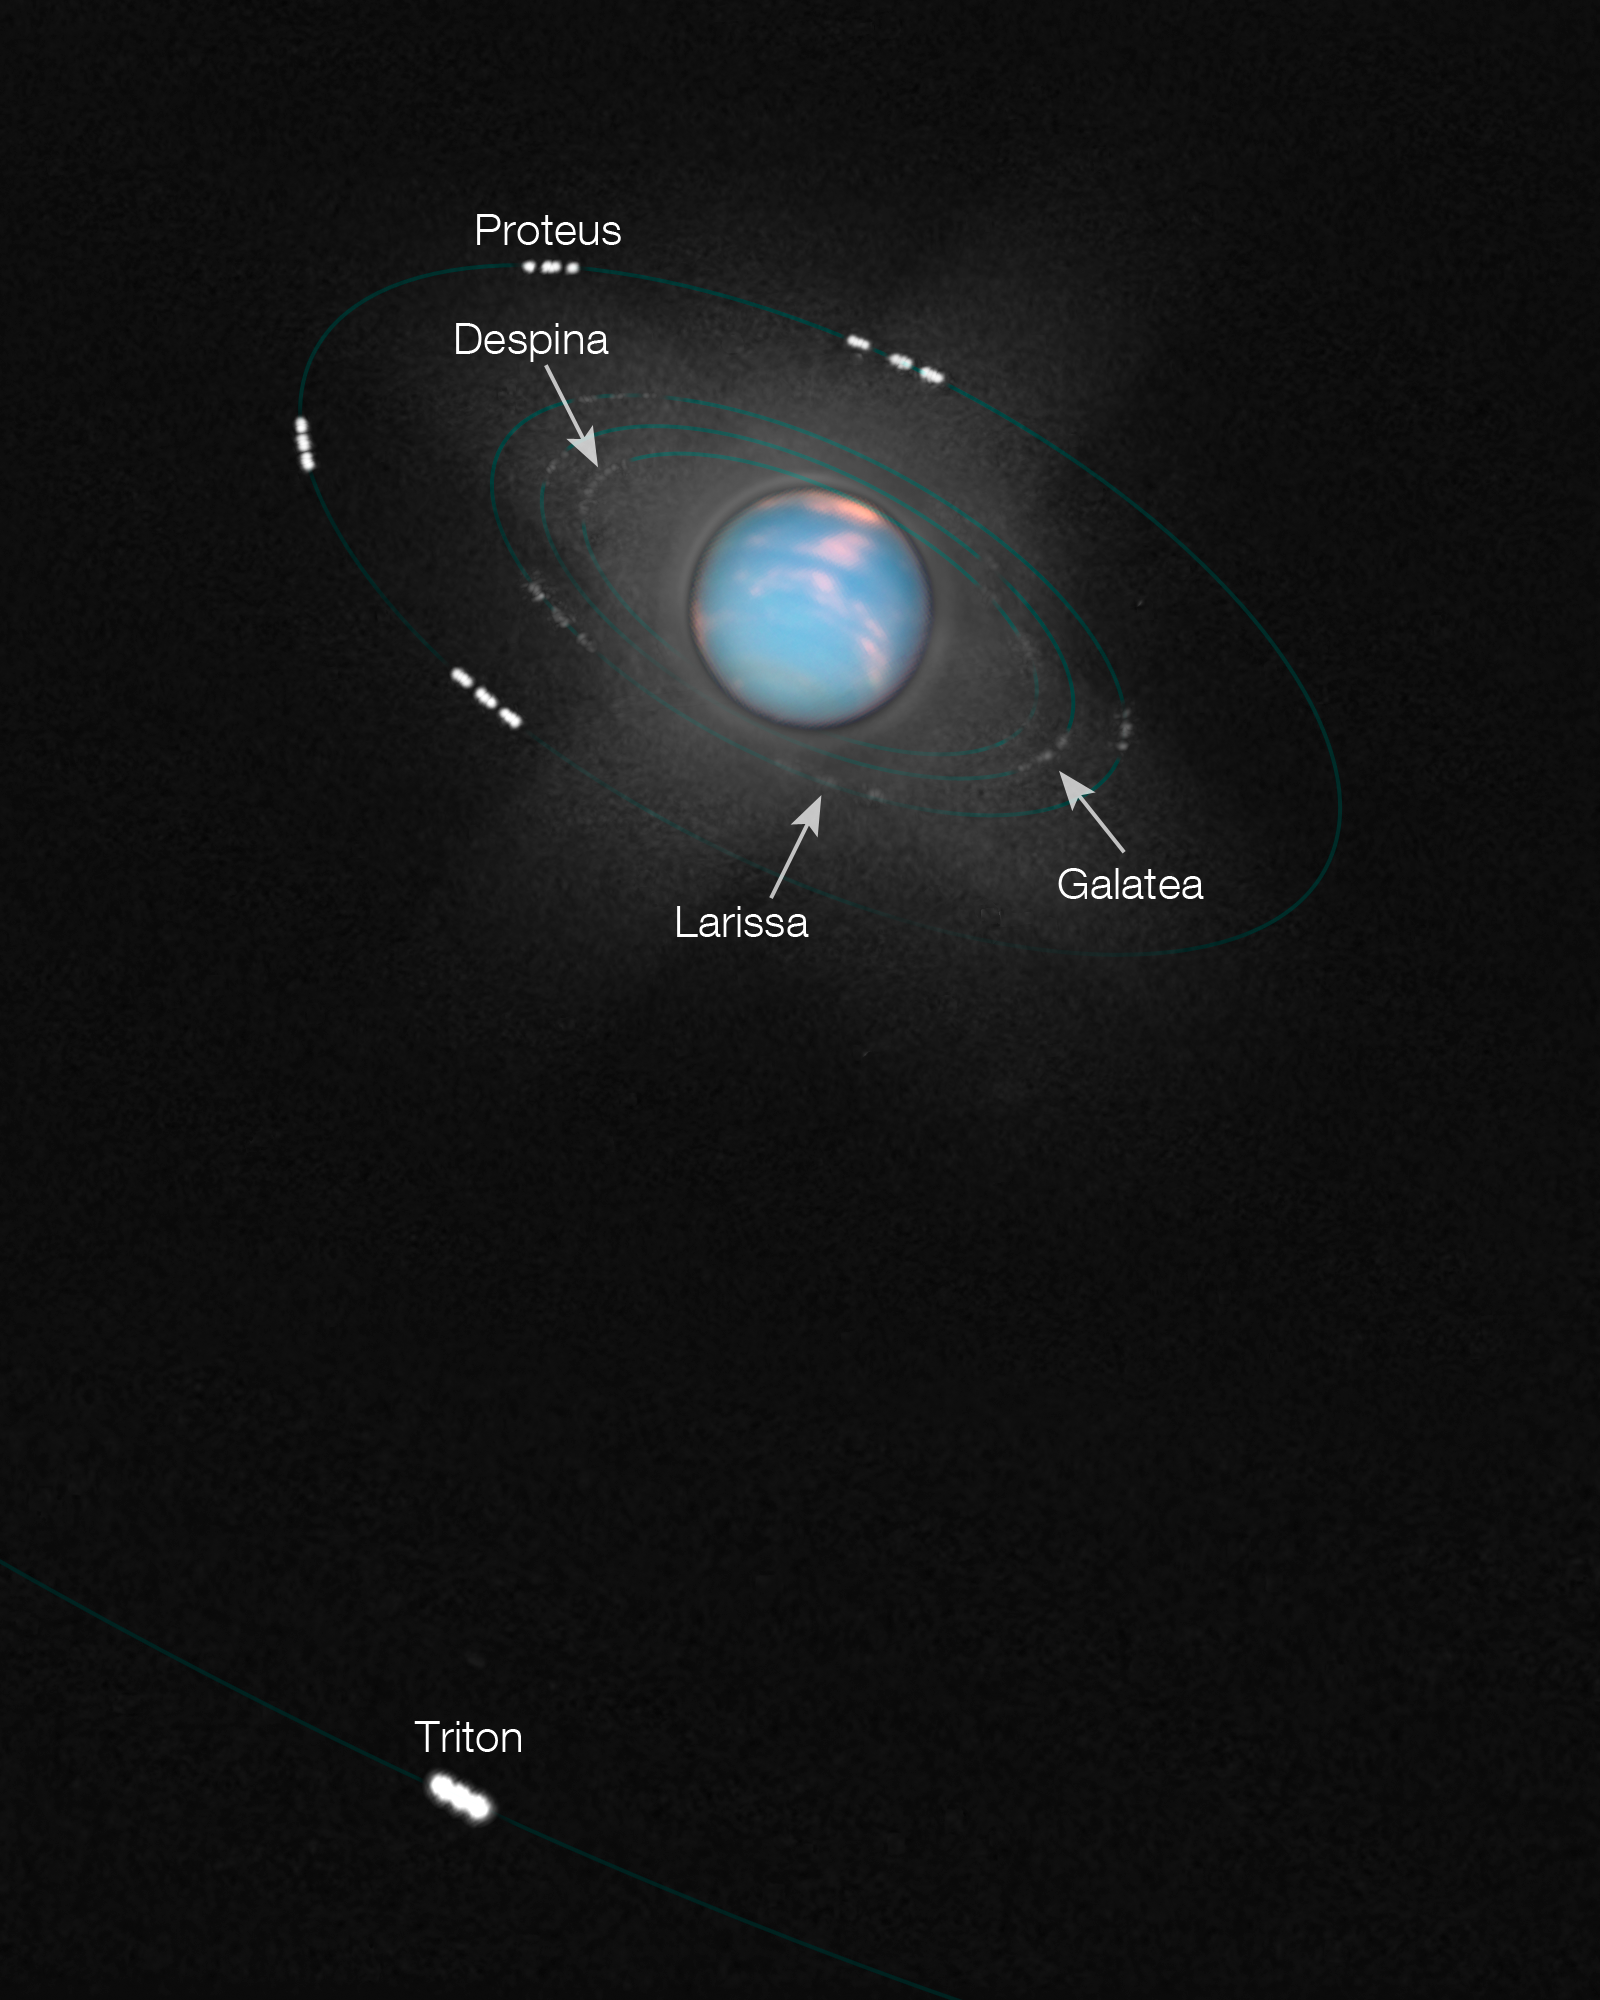

Neptune and its moons

This image is a composite of several exposures of Neptune, taken a few hours apart with the NASA/ESA Hubble Space Telescope’s Wide Field Camera 3. The different images overlaid on each other clearly show five of Neptune’s moons, Proteus, Despina, Larissa, Galatea and Triton, moving around the planet.

Hubble’s images were taken to celebrate the first complete orbit of the planet since its discovery in 1846. The four images show different faces of the planet as it rotates on its axis.

Credit: NASA, ESA and the Hubble Heritage Team (STScI/AURA)